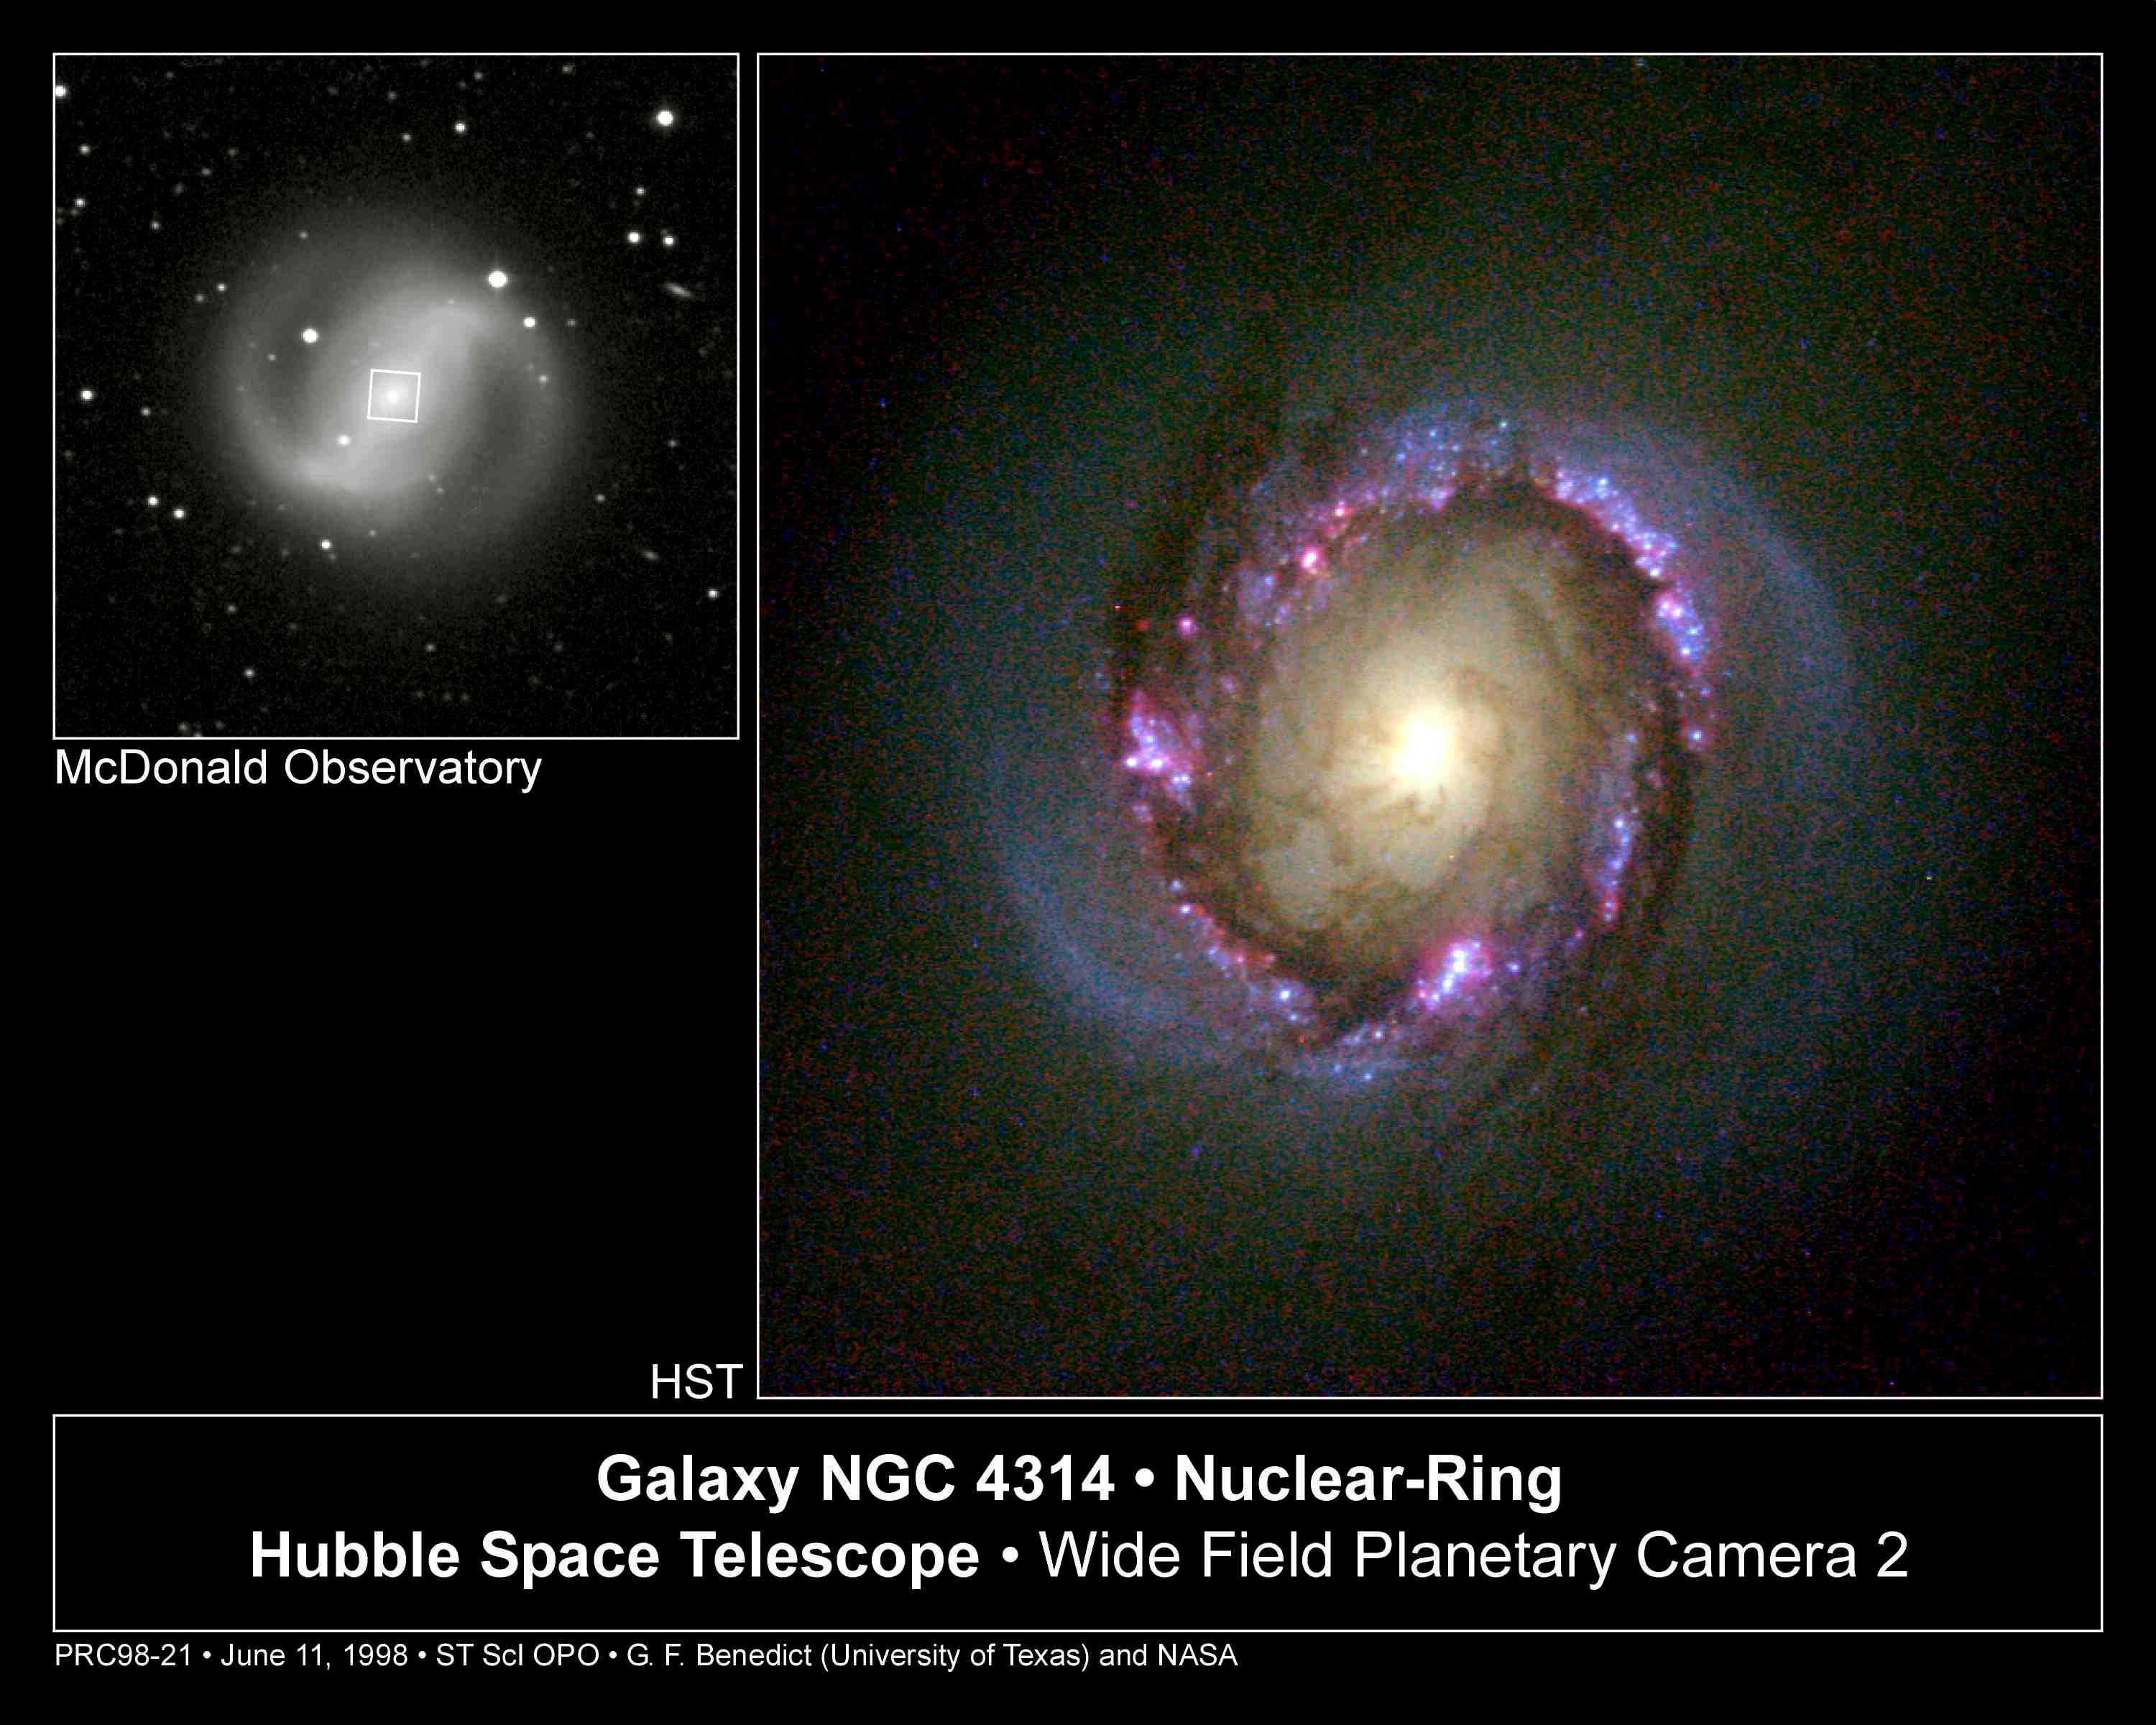

Galaxy NGC 4314

An image from the NASA/ESA Hubble Space Telescope reveals clusters of infant stars that formed in a ring around the core of the barred-spiral galaxy NGC 4314. This stellar nursery, whose inhabitants were created within the past 5 million years, is the only place in the entire galaxy where new stars are being born. The Hubble image is being presented today (June 11) at the American Astronomical Society meeting in San Diego, Calif.

Credit: G. Fritz Benedict, Andrew Howell, Inger Jorgensen, David Chapell (University of Texas), Jeffery Kenney (Yale University), and Beverly J. Smith (CASA, University of Colorado), and NASA/ESA